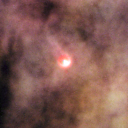

198-222

One of 42 new proplyds discovered in the Orion Nebula, 198-222 is one of the bright proplyds that lies relatively close to the nebula’s brightest star, Theta 1 Orionis C. The tadpole-shaped tail is actually a jet of matter flowing away from the excited cusp.

Credit: NASA/ESA and L. Ricci (ESO)